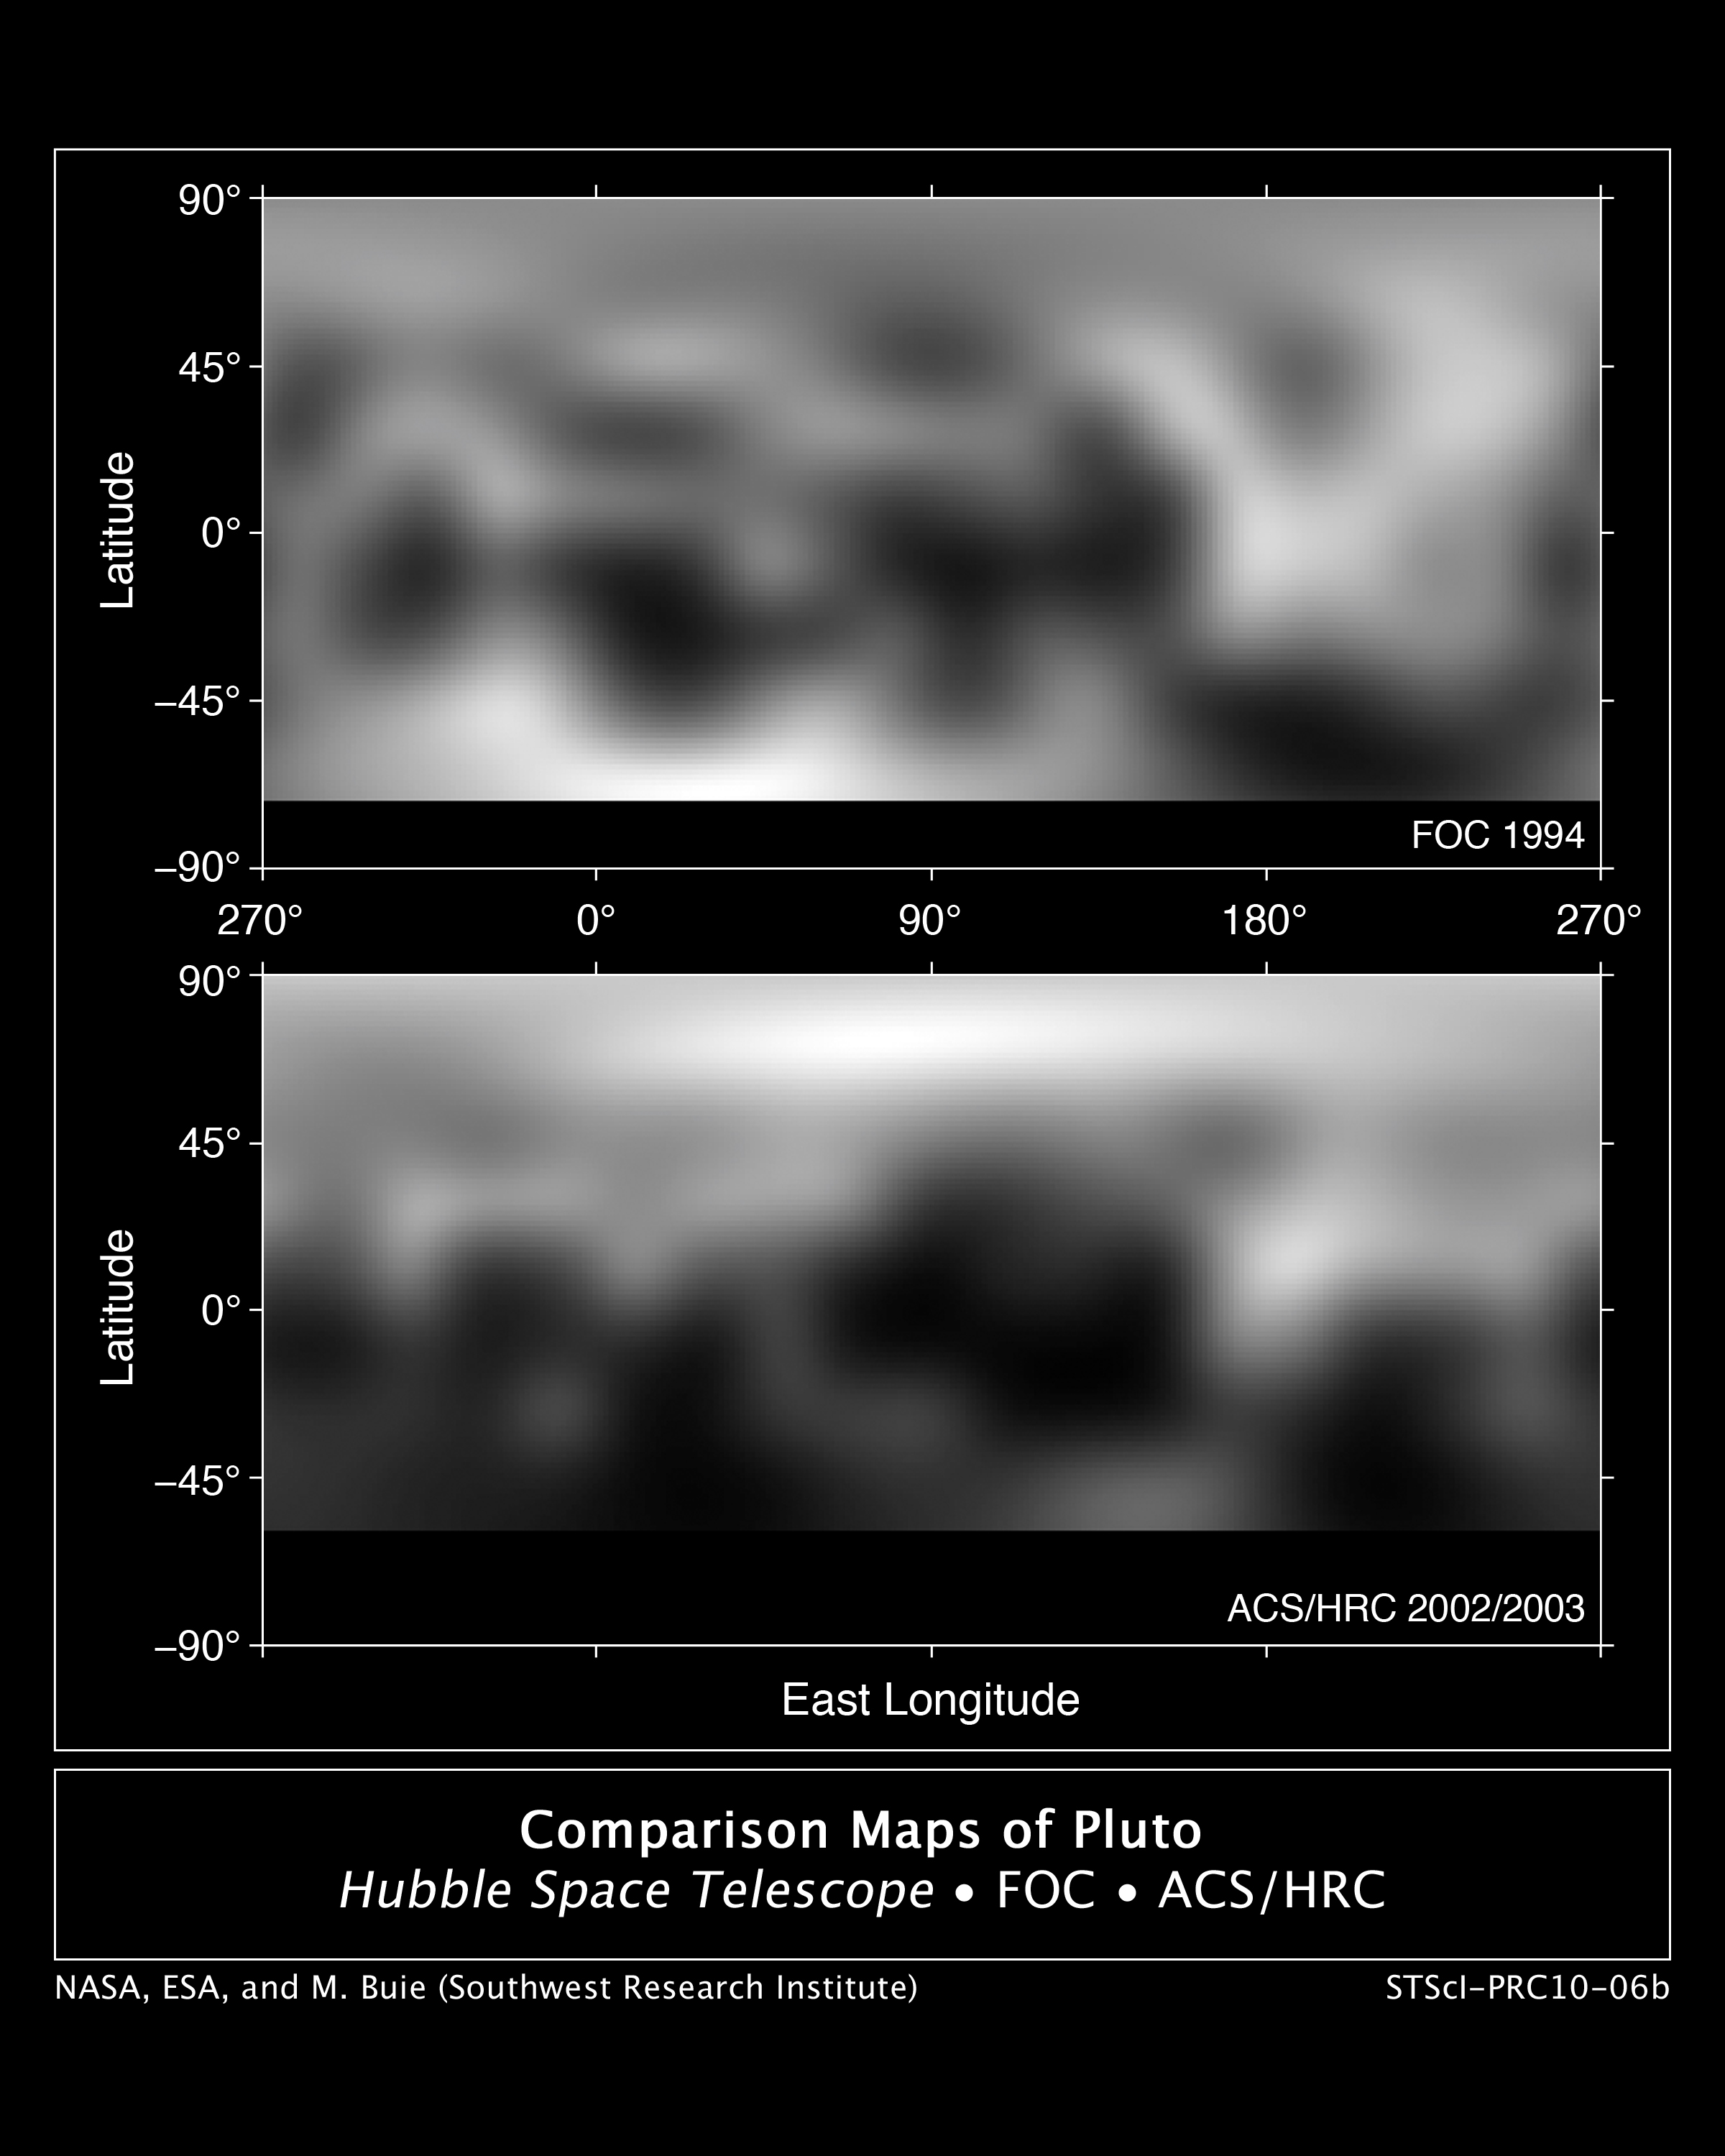

Hubble maps Pluto's changing surface

These are two Hubble photo maps of the dwarf planet Pluto, as seen in 1994 and 2002-2003. Hubble's view isn't sharp enough to see craters or mountains, if they exist on the surface, but Hubble does reveal a complex-looking and variegated world with white and charcoal-black terrain. The white areas are surface frost, and the dark areas are a carbon-rich residue caused by sunlight breaking up methane that is present on Pluto's surface.

A comparison of the maps shows that Pluto's brightness has changed between 1994 and 2003. The northern pole is brighter and the southern hemisphere is darker. Summer is approaching Pluto's north pole, and this may cause surface ices to melt and refreeze in the colder shadowed portion of the planet.

The Hubble pictures underscore that Pluto is not simply a ball of ice and rock but a dynamic world that undergoes dramatic atmospheric changes. These atmospheric changes are driven by seasonal changes that are as much propelled by the planet's 248-year elliptical orbit as its axial tilt, unlike Earth where the tilt alone drives seasons.

The top picture was taken in 1994 by the European Space Agency's Faint Object Camera. The bottom image was taken in 2002-2003 by the Advanced Camera for Surveys. The dark band at the bottom of each map is the region that was hidden from view at the time the data were taken.

Credit: NASA, ESA and M. Buie (Southwest Research Institute)